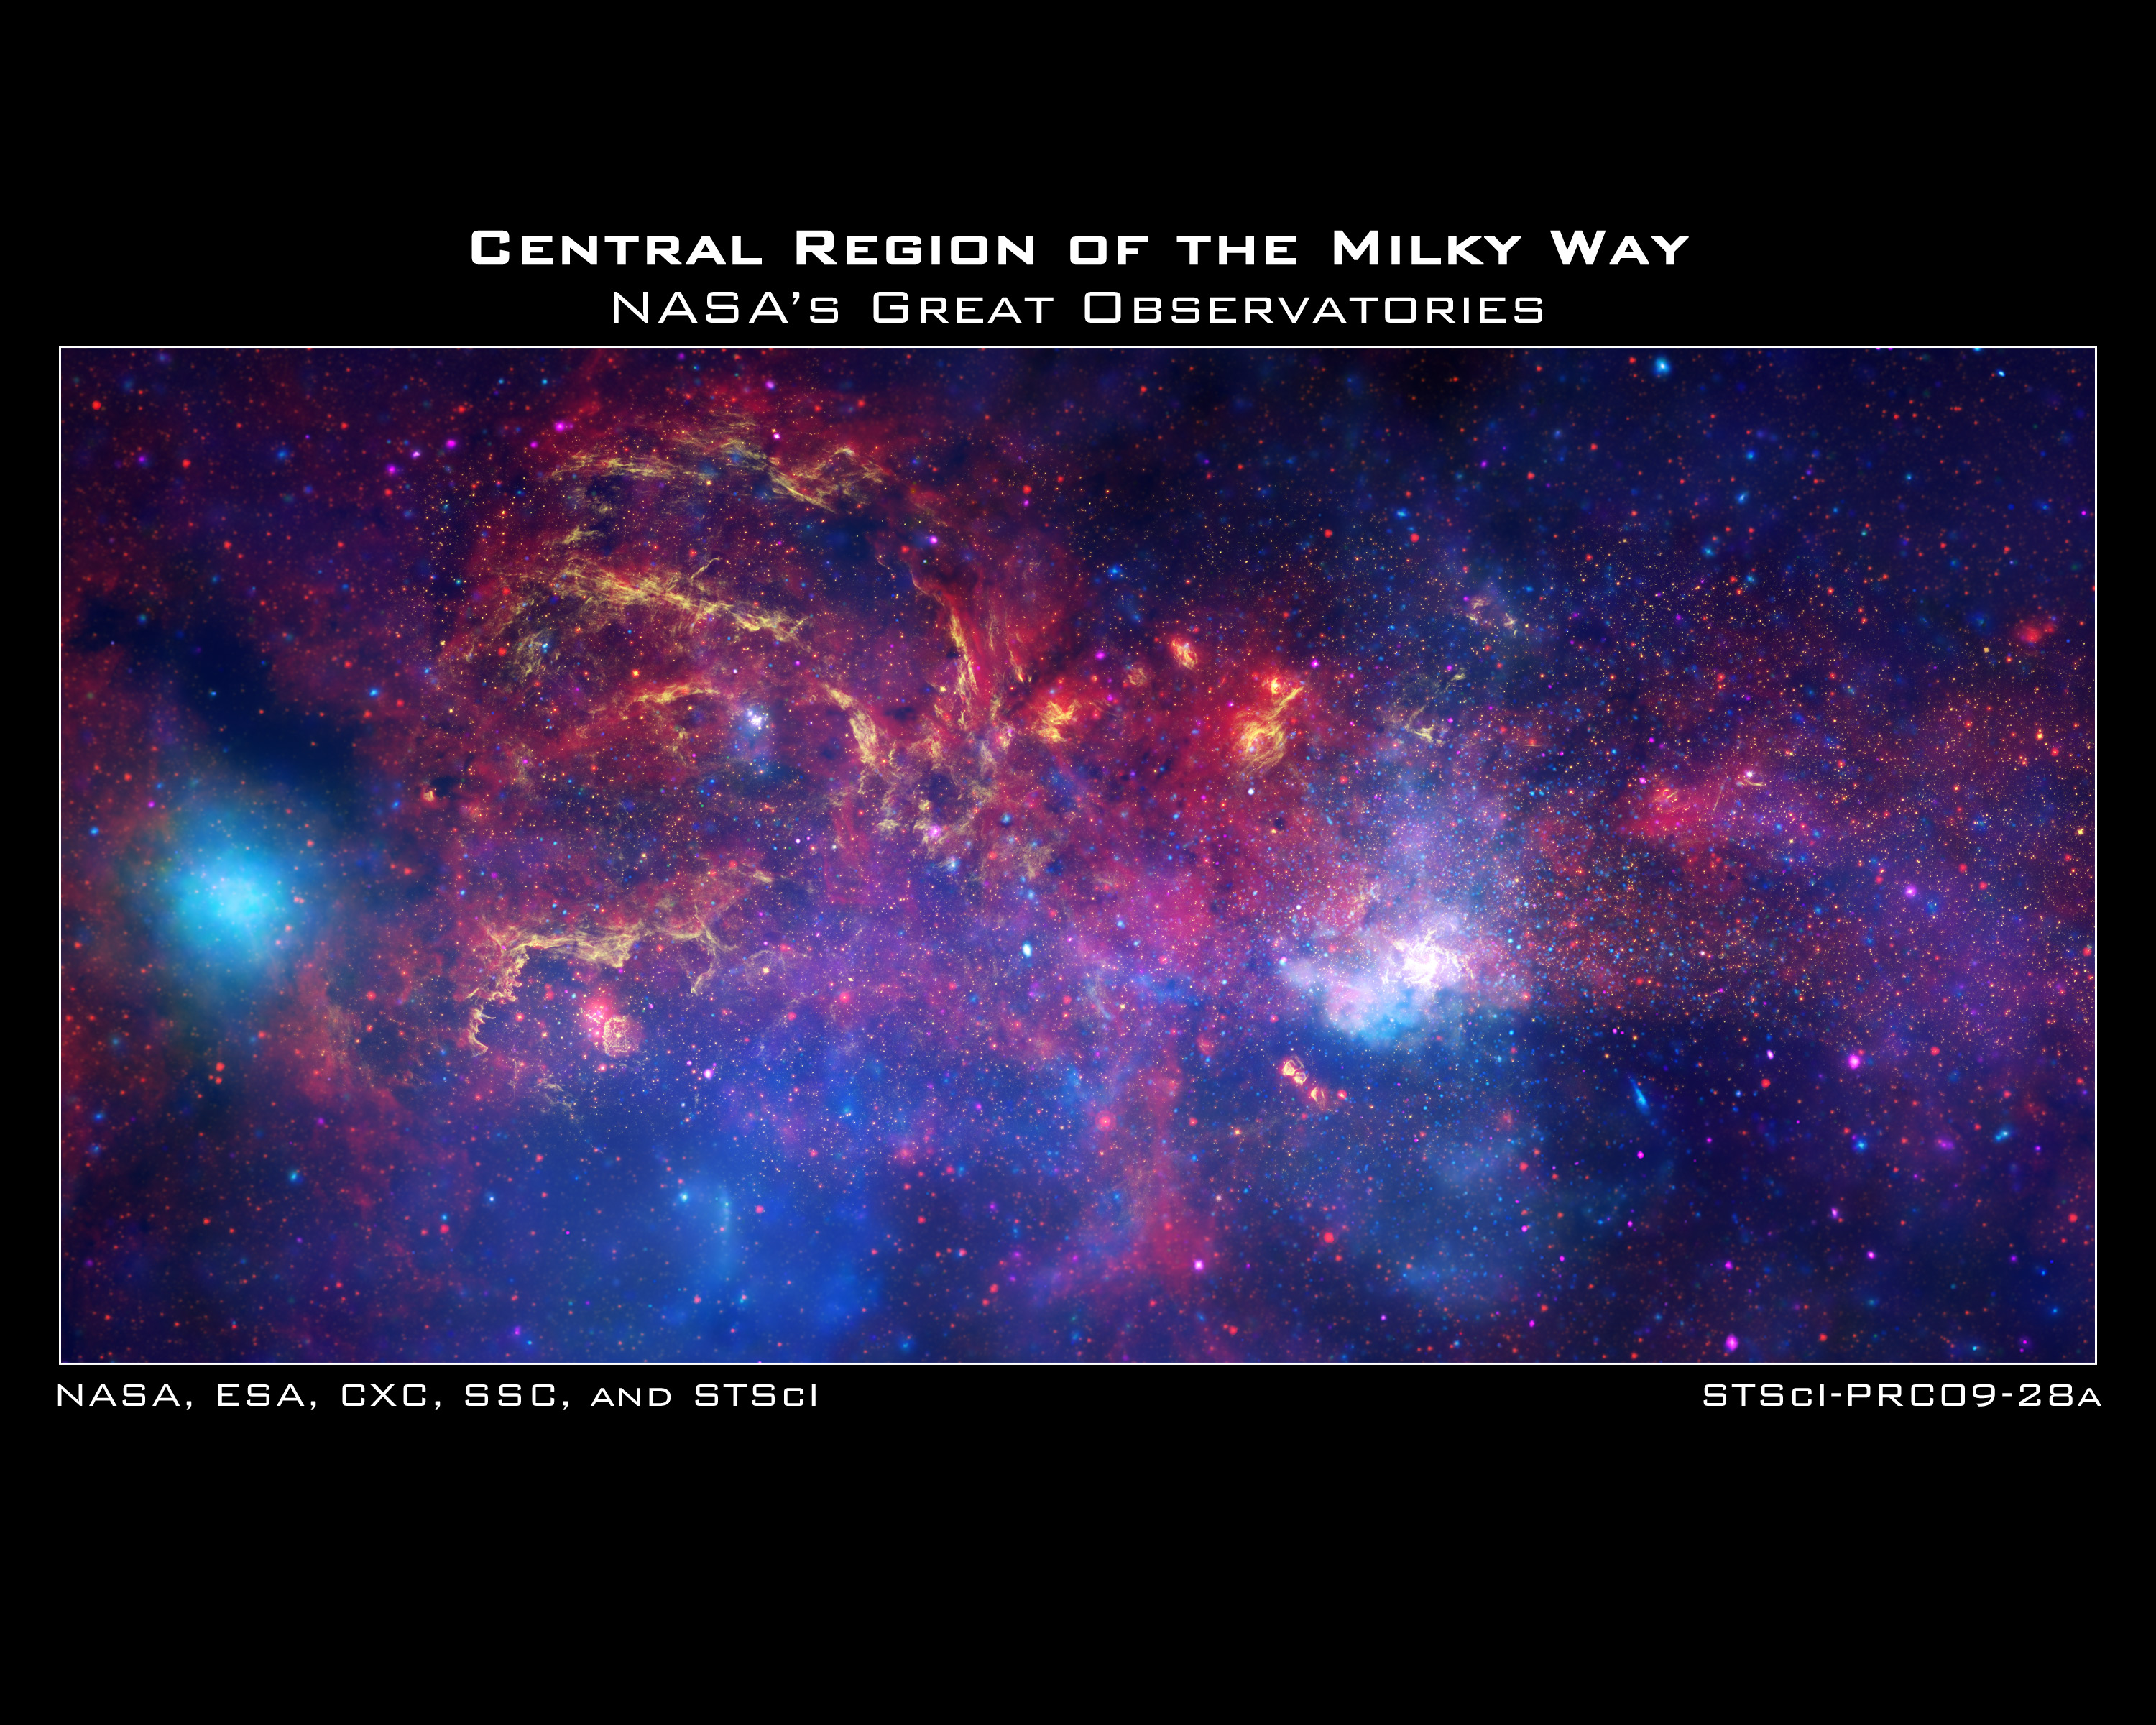

Hubble and other great observatories examine the galactic centre region

In celebration of the International Year of Astronomy 2009, the NASA/ESA Hubble Space Telescope and its companion Great Observatories: the Spitzer Space Telescope and the Chandra X-ray Observatory have collaborated to produce an unprecedented image of the central region of our Milky Way galaxy.

In this spectacular image, observations using infrared light and X-ray light see through the obscuring dust and reveal the intense activity near the galactic core. Note that the centre of the galaxy is located within the bright white region to the right of and just below the middle of the image. The entire image width covers about one-half a degree, about the same angular width as the full moon.

Each telescope's contribution is presented in a different colour:

Yellow represents the near-infrared observations of Hubble. They outline the energetic regions where stars are being born as well as reveal hundreds of thousands of stars.
Red represents the infrared observations of Spitzer. The radiation and winds from stars create glowing dust clouds that exhibit complex structures from compact, spherical globules to long, stringy filaments.
Blue and violet represent the X-ray observations of Chandra. X-rays are emitted by gas heated to millions of degrees by stellar explosions and by outflows from the supermassive black hole in the galaxy’s centre. The bright blue blob on the left side is emission from a double star system containing either a neutron star or a black hole.

When these views are brought together, this composite image provides one of the most detailed views ever of our galaxy's mysterious core.

Credit: NASA, ESA, SSC, CXC and STScI